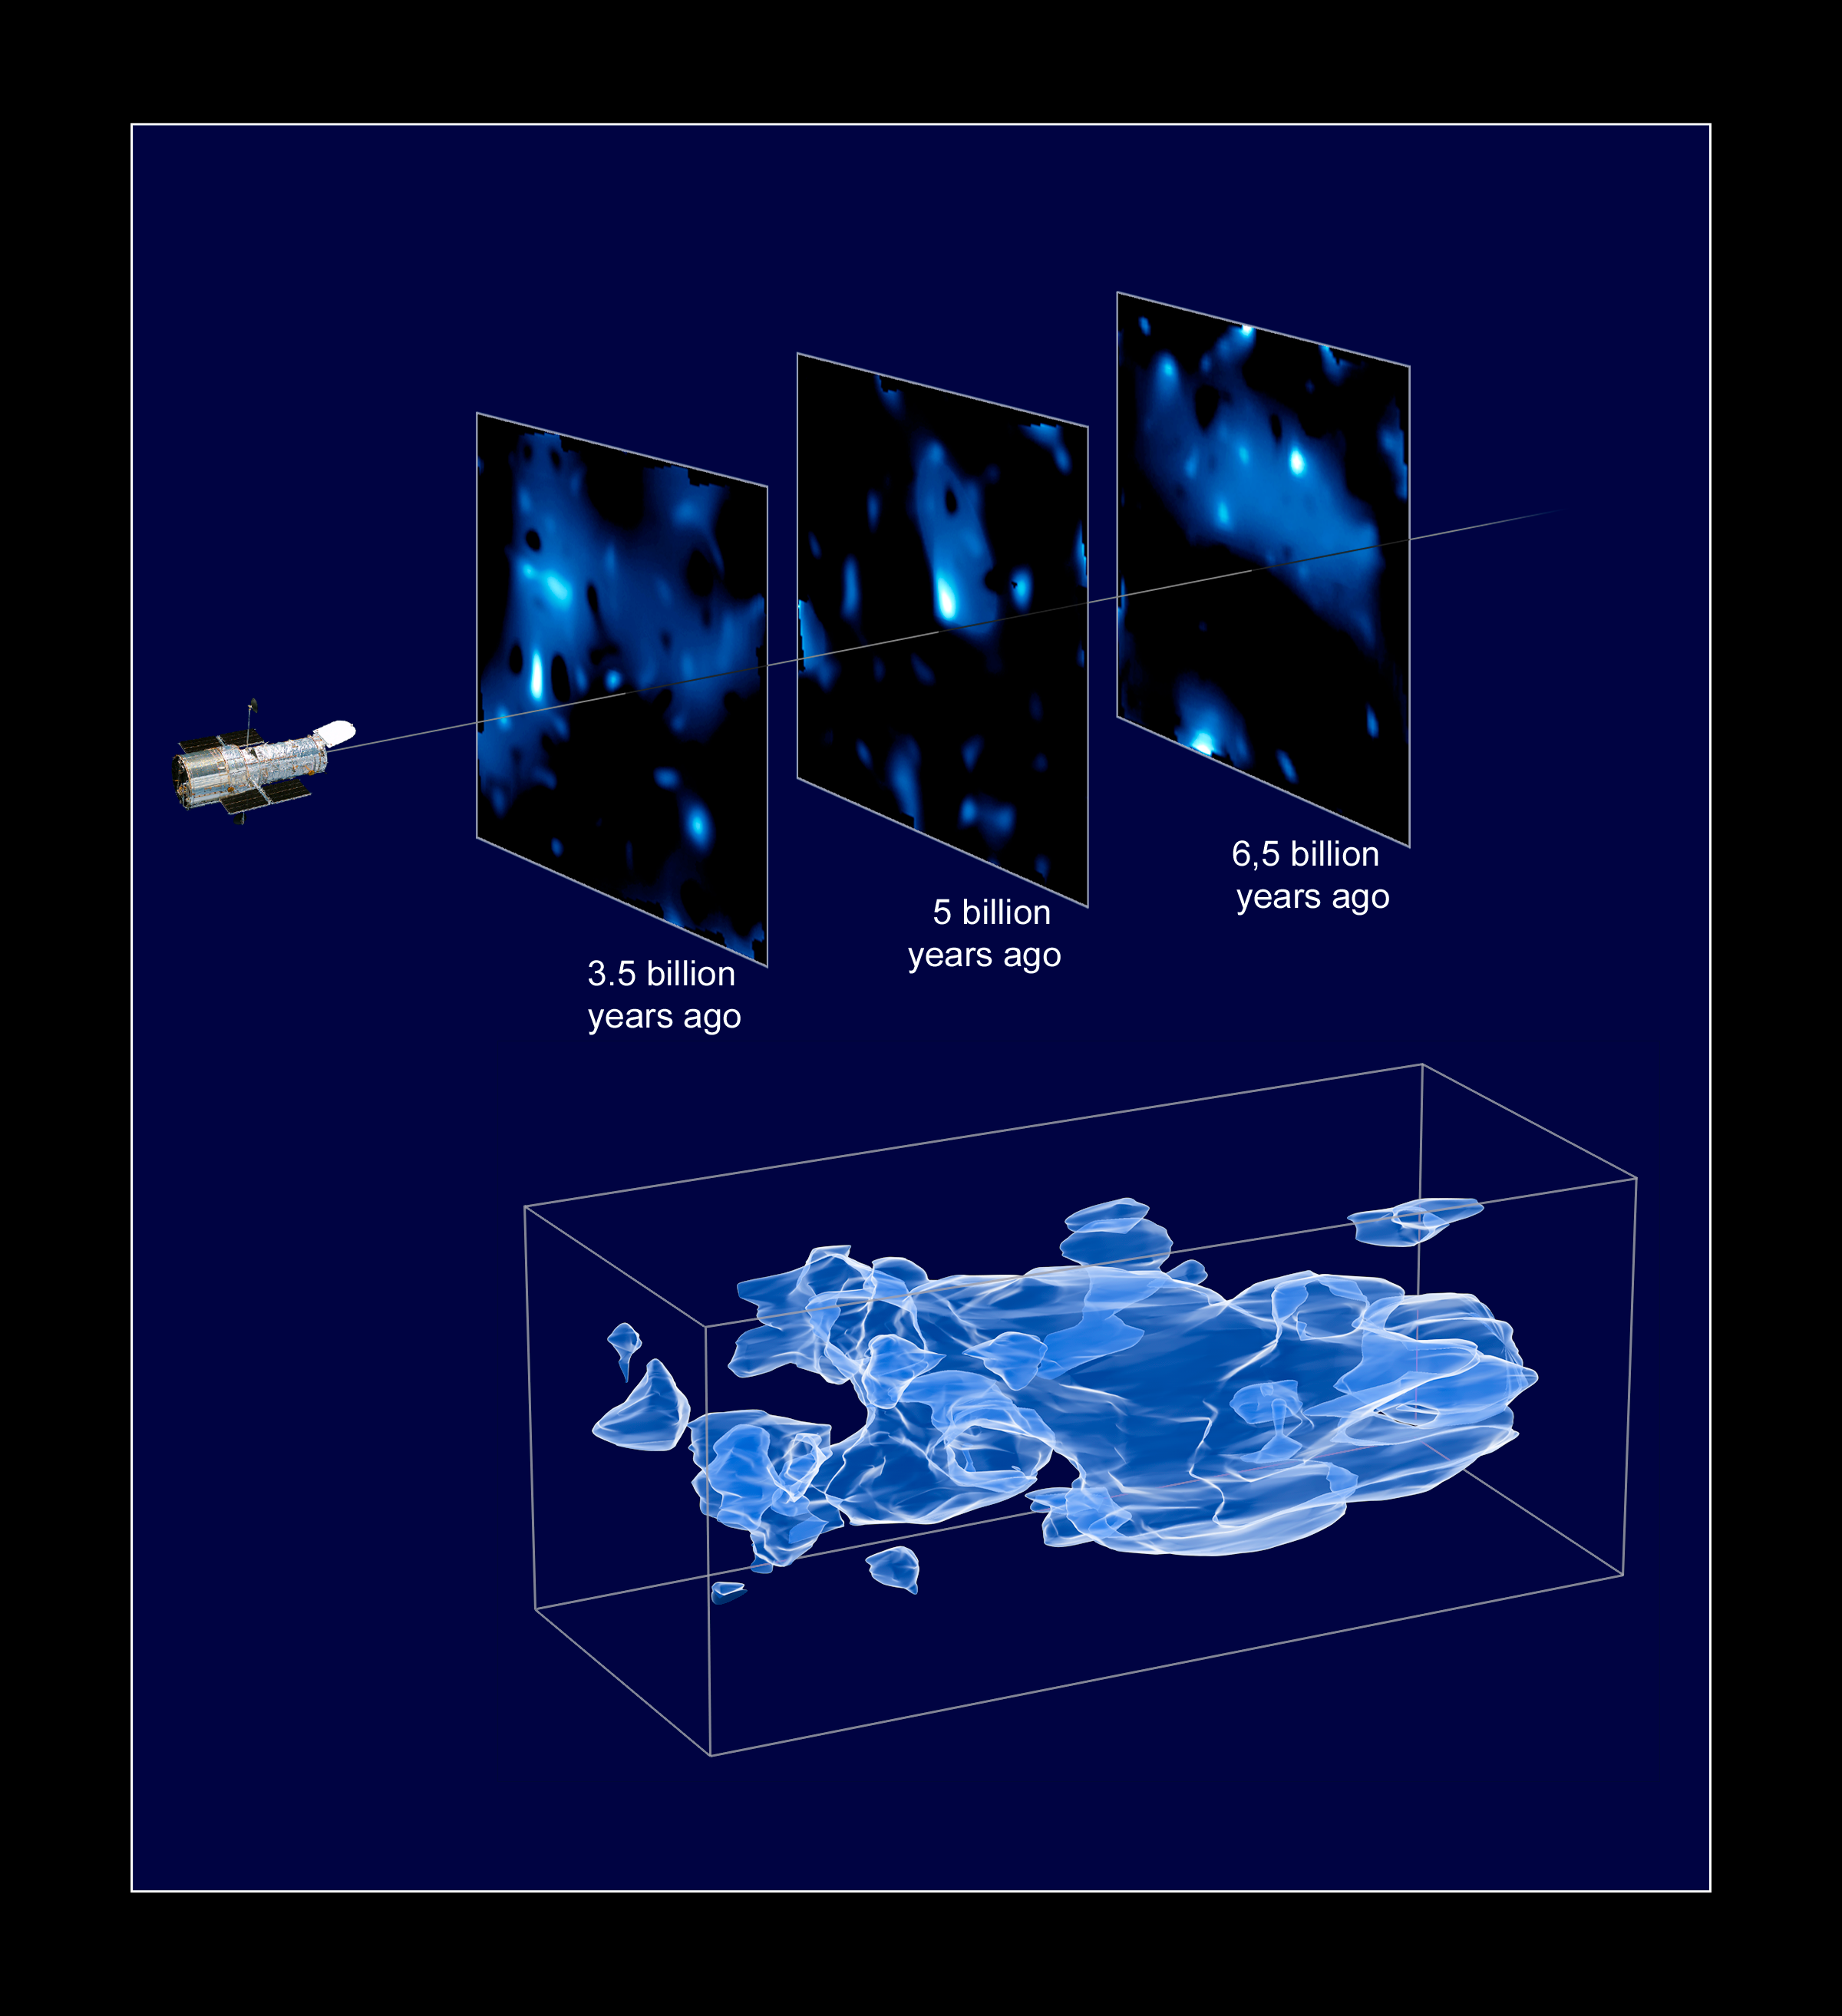

Three-dimensional distribution of dark matter in the Universe (artist's impression)

This three-dimensional map offers a first look at the web-like large-scale distribution of dark matter, an invisible form of matter that accounts for most of the Universe's mass. This milestone takes astronomers from inference to direct observation of dark matter's influence in the Universe. Because of the finite speed of light, regions furthest away are also seen as they existed a long time ago. The map stretches halfway back in time to the beginning of the Universe.

The map reveals a loose network of dark matter filaments, gradually collapsing under the relentless pull of gravity, and growing clumpier over time. This confirms theories of how structure formed in our evolving Universe, which has transitioned from a comparatively smooth distribution of matter at the time of the big bang. The dark matter filaments began to form first and provided an underlying scaffolding for the subsequent construction of stars and galaxies from ordinary matter. Without dark matter, there would have been insufficient mass in the Universe for structures to collapse and galaxies to form.

[Top] - Three slices through the evolving distribution of dark matter. The dataset is created by splitting the background source galaxy population into discrete epochs of time (like cutting through geologic strata), looking back into the past. This is calibrated by measuring the cosmological redshift of the lensing galaxies used to map the dark matter distribution, and binning them into different time/distance "slices". Each panel represents an area of sky nine times the angular diameter of the full Moon. Note that this fixed angle means that the survey volume is a really a cone, and that the physical area of the slices increases (from 60 million light-years on a side to 100 million light-years on a side) from left to right.

[Bottom] - When the slices across the Universe and back into time are combined, they make a three-dimensional map of dark matter in the Universe. The three axes of the box correspond to sky position (in right ascension and declination), and distance from the Earth increasing from left to right (as measured by cosmological redshift). Note how the clumping of the dark matter becomes more pronounced, moving right to left across the volume map, from the early Universe to the more recent Universe.

The dark matter distribution was mapped with Hubble Space Telescope's largest ever survey of the Universe, the Cosmic Evolution Survey ("COSMOS"). To compile the COSMOS survey, Hubble imaged 575 adjacent and slightly overlapping views of the Universe using the Advanced Camera for Surveys' (ACS) Wide Field Camera onboard Hubble. It took nearly 1,000 hours of observations. The distances to the galaxies were determined from their spectral redshifts, using ESO's Very Large Telescope, the Subaru and CFHT telescopes in Hawaii and the Magellan telescope in Chile.

Credit: NASA, ESA and R. Massey (California Institute of Technology)